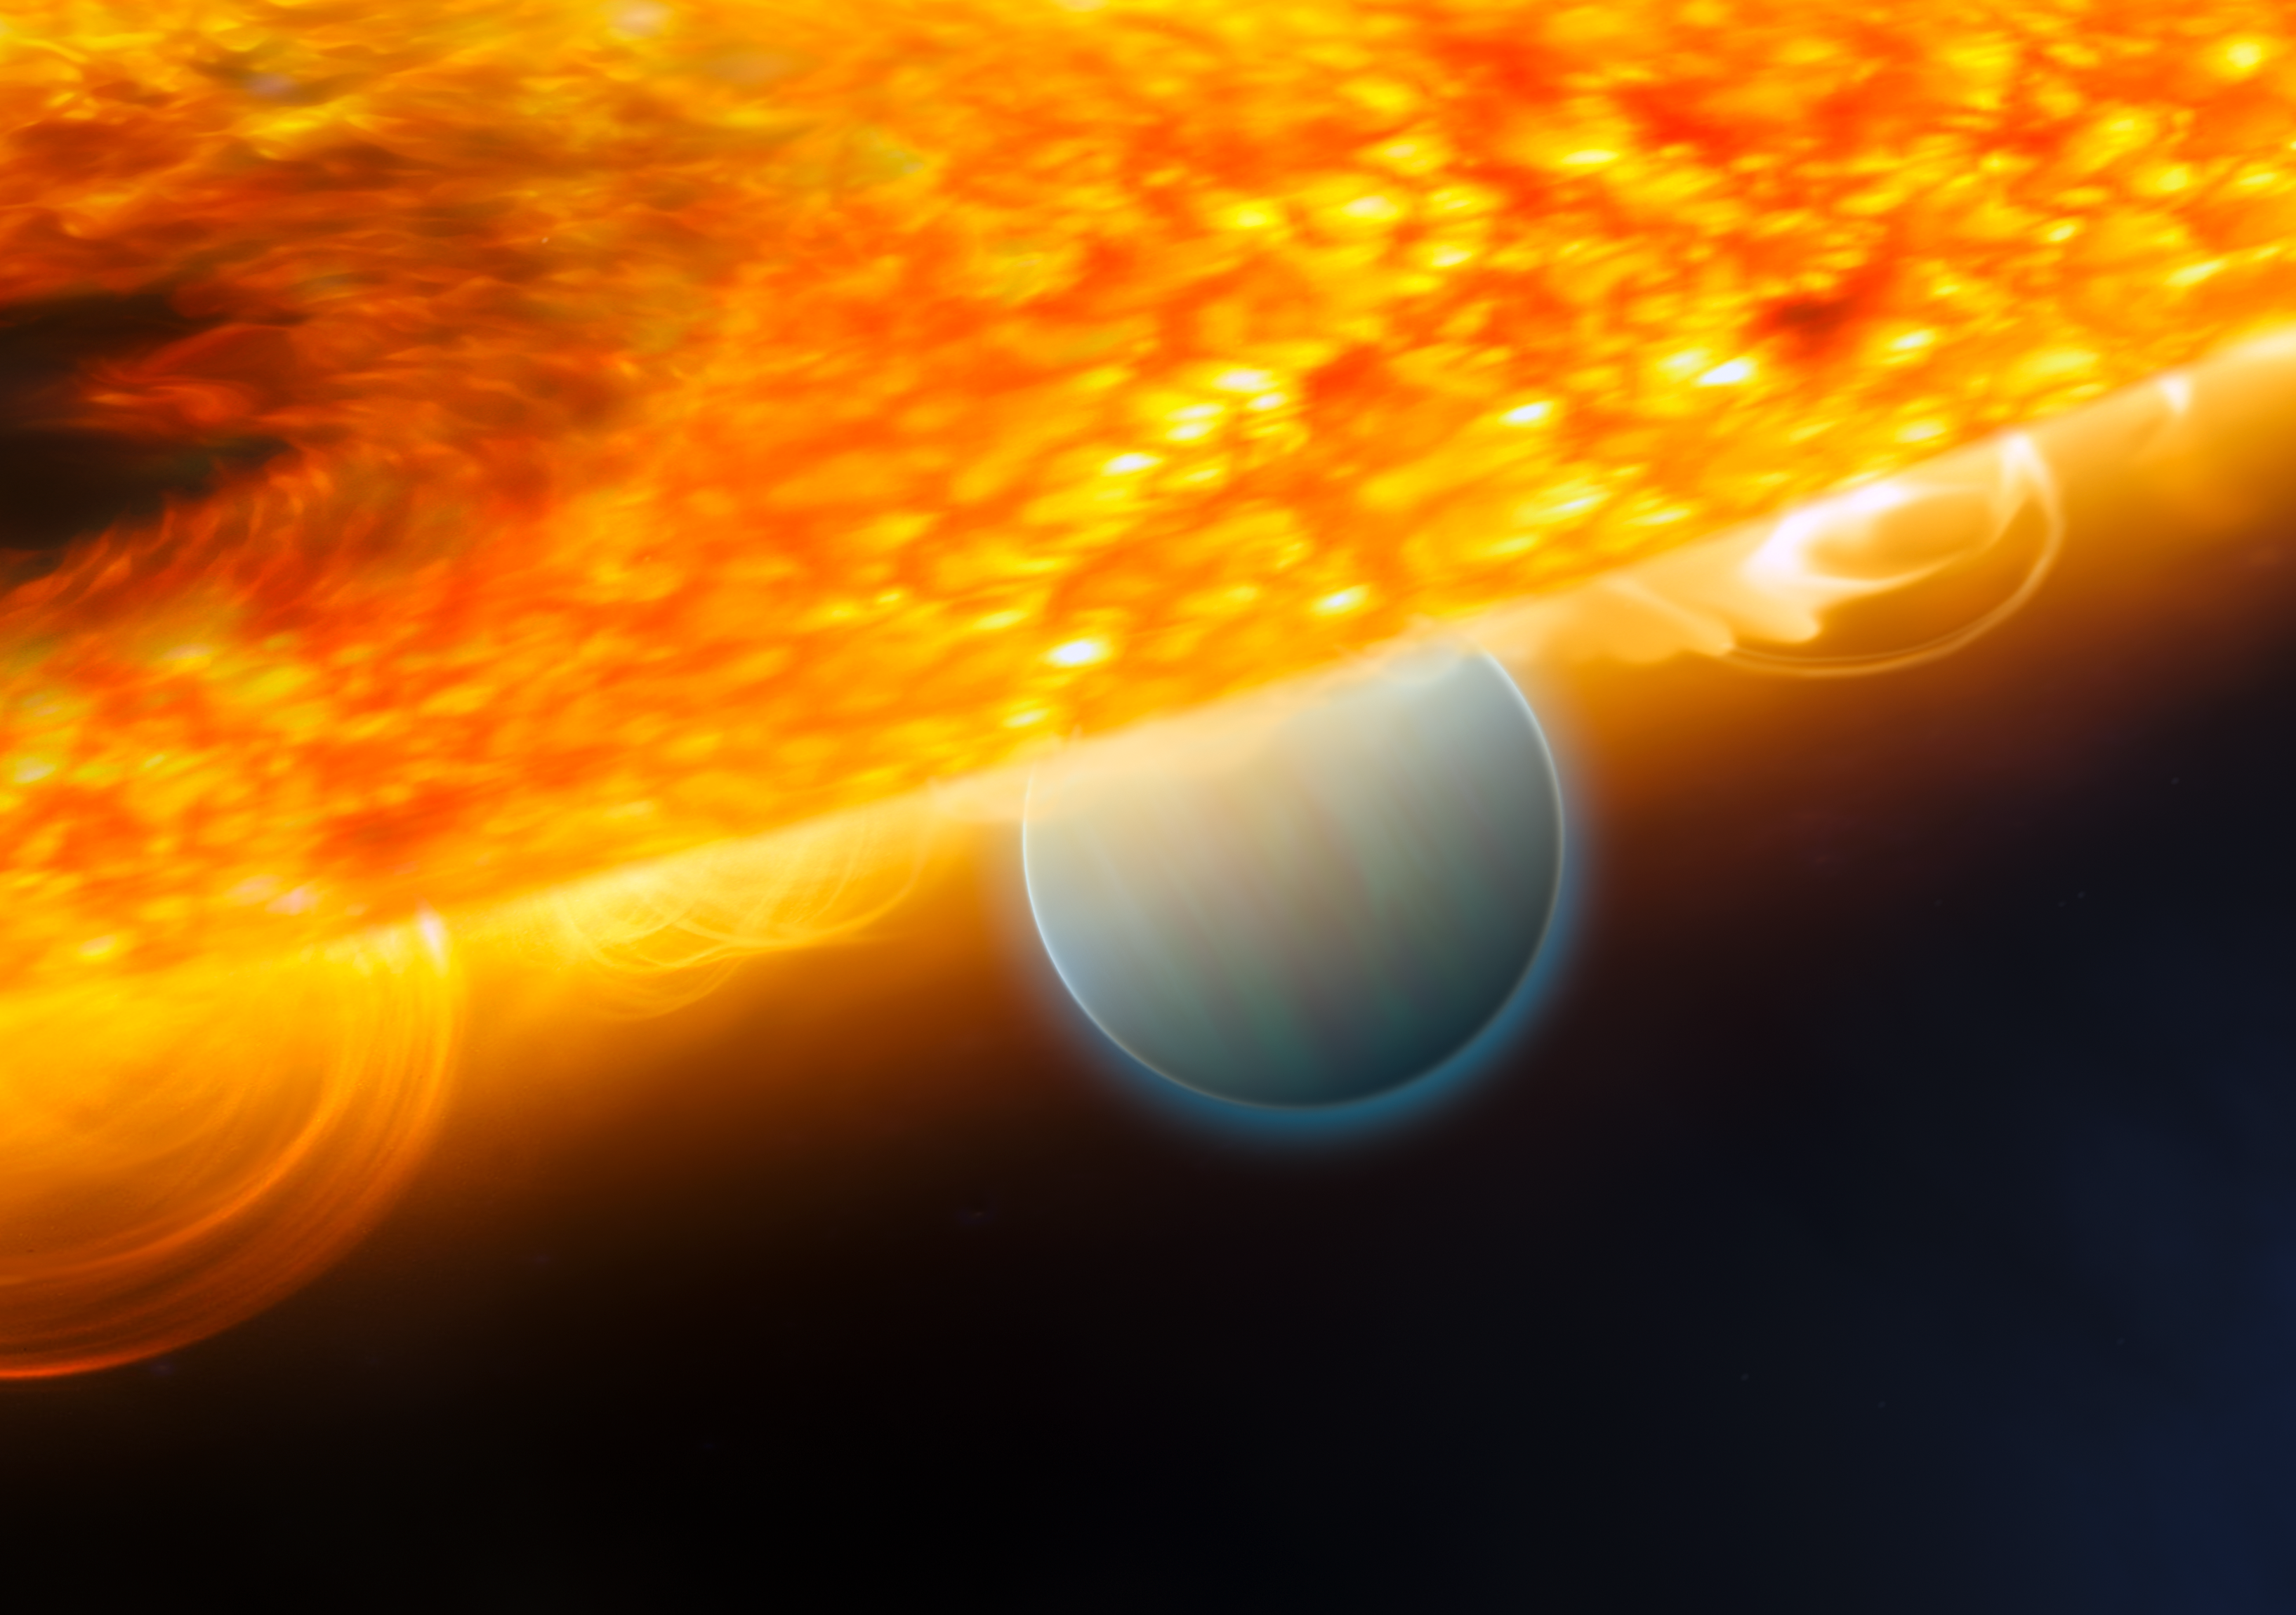

Planet eclipse allows for detection of carbon dioxide (artist's impression)

This is an artist's impression of the Jupiter-size extrasolar planet, HD 189733b, being eclipsed by its parent star. Astronomers using the Hubble Space Telescope have measured carbon dioxide and carbon monoxide in the planet's atmosphere. The planet is a "hot Jupiter," which is so close to its parent star that it completes an orbit in only 2.2 days.

This type of observation is best done when the planet's orbit carries it behind the star (as seen from Earth), which allows an opportunity to subtract the light of the star alone (when the planet is blocked) from that of the star and planet together prior to eclipse. This allows astronomers to isolate the infrared emission of the planet and make spectroscopic observations that chemically analyse the day side atmosphere.

The planet is too hot for life, as we know it. But under the right conditions, on a more Earth-like world, carbon dioxide can indicate the presence of extraterrestrial life. This observation demonstrates that chemical biotracers can be detected by space telescope observations.

Credit: ESA, NASA, M. Kornmesser (ESA/Hubble) and STScI